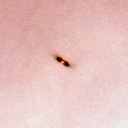

132-1832

One of 42 new proplyds discovered in the Orion Nebula, 132-1832 is one of the dark proplyds that lies relatively far from the nebula’s brightest star, Theta 1 Orionis C.

Credit: NASA/ESA and L. Ricci (ESO)